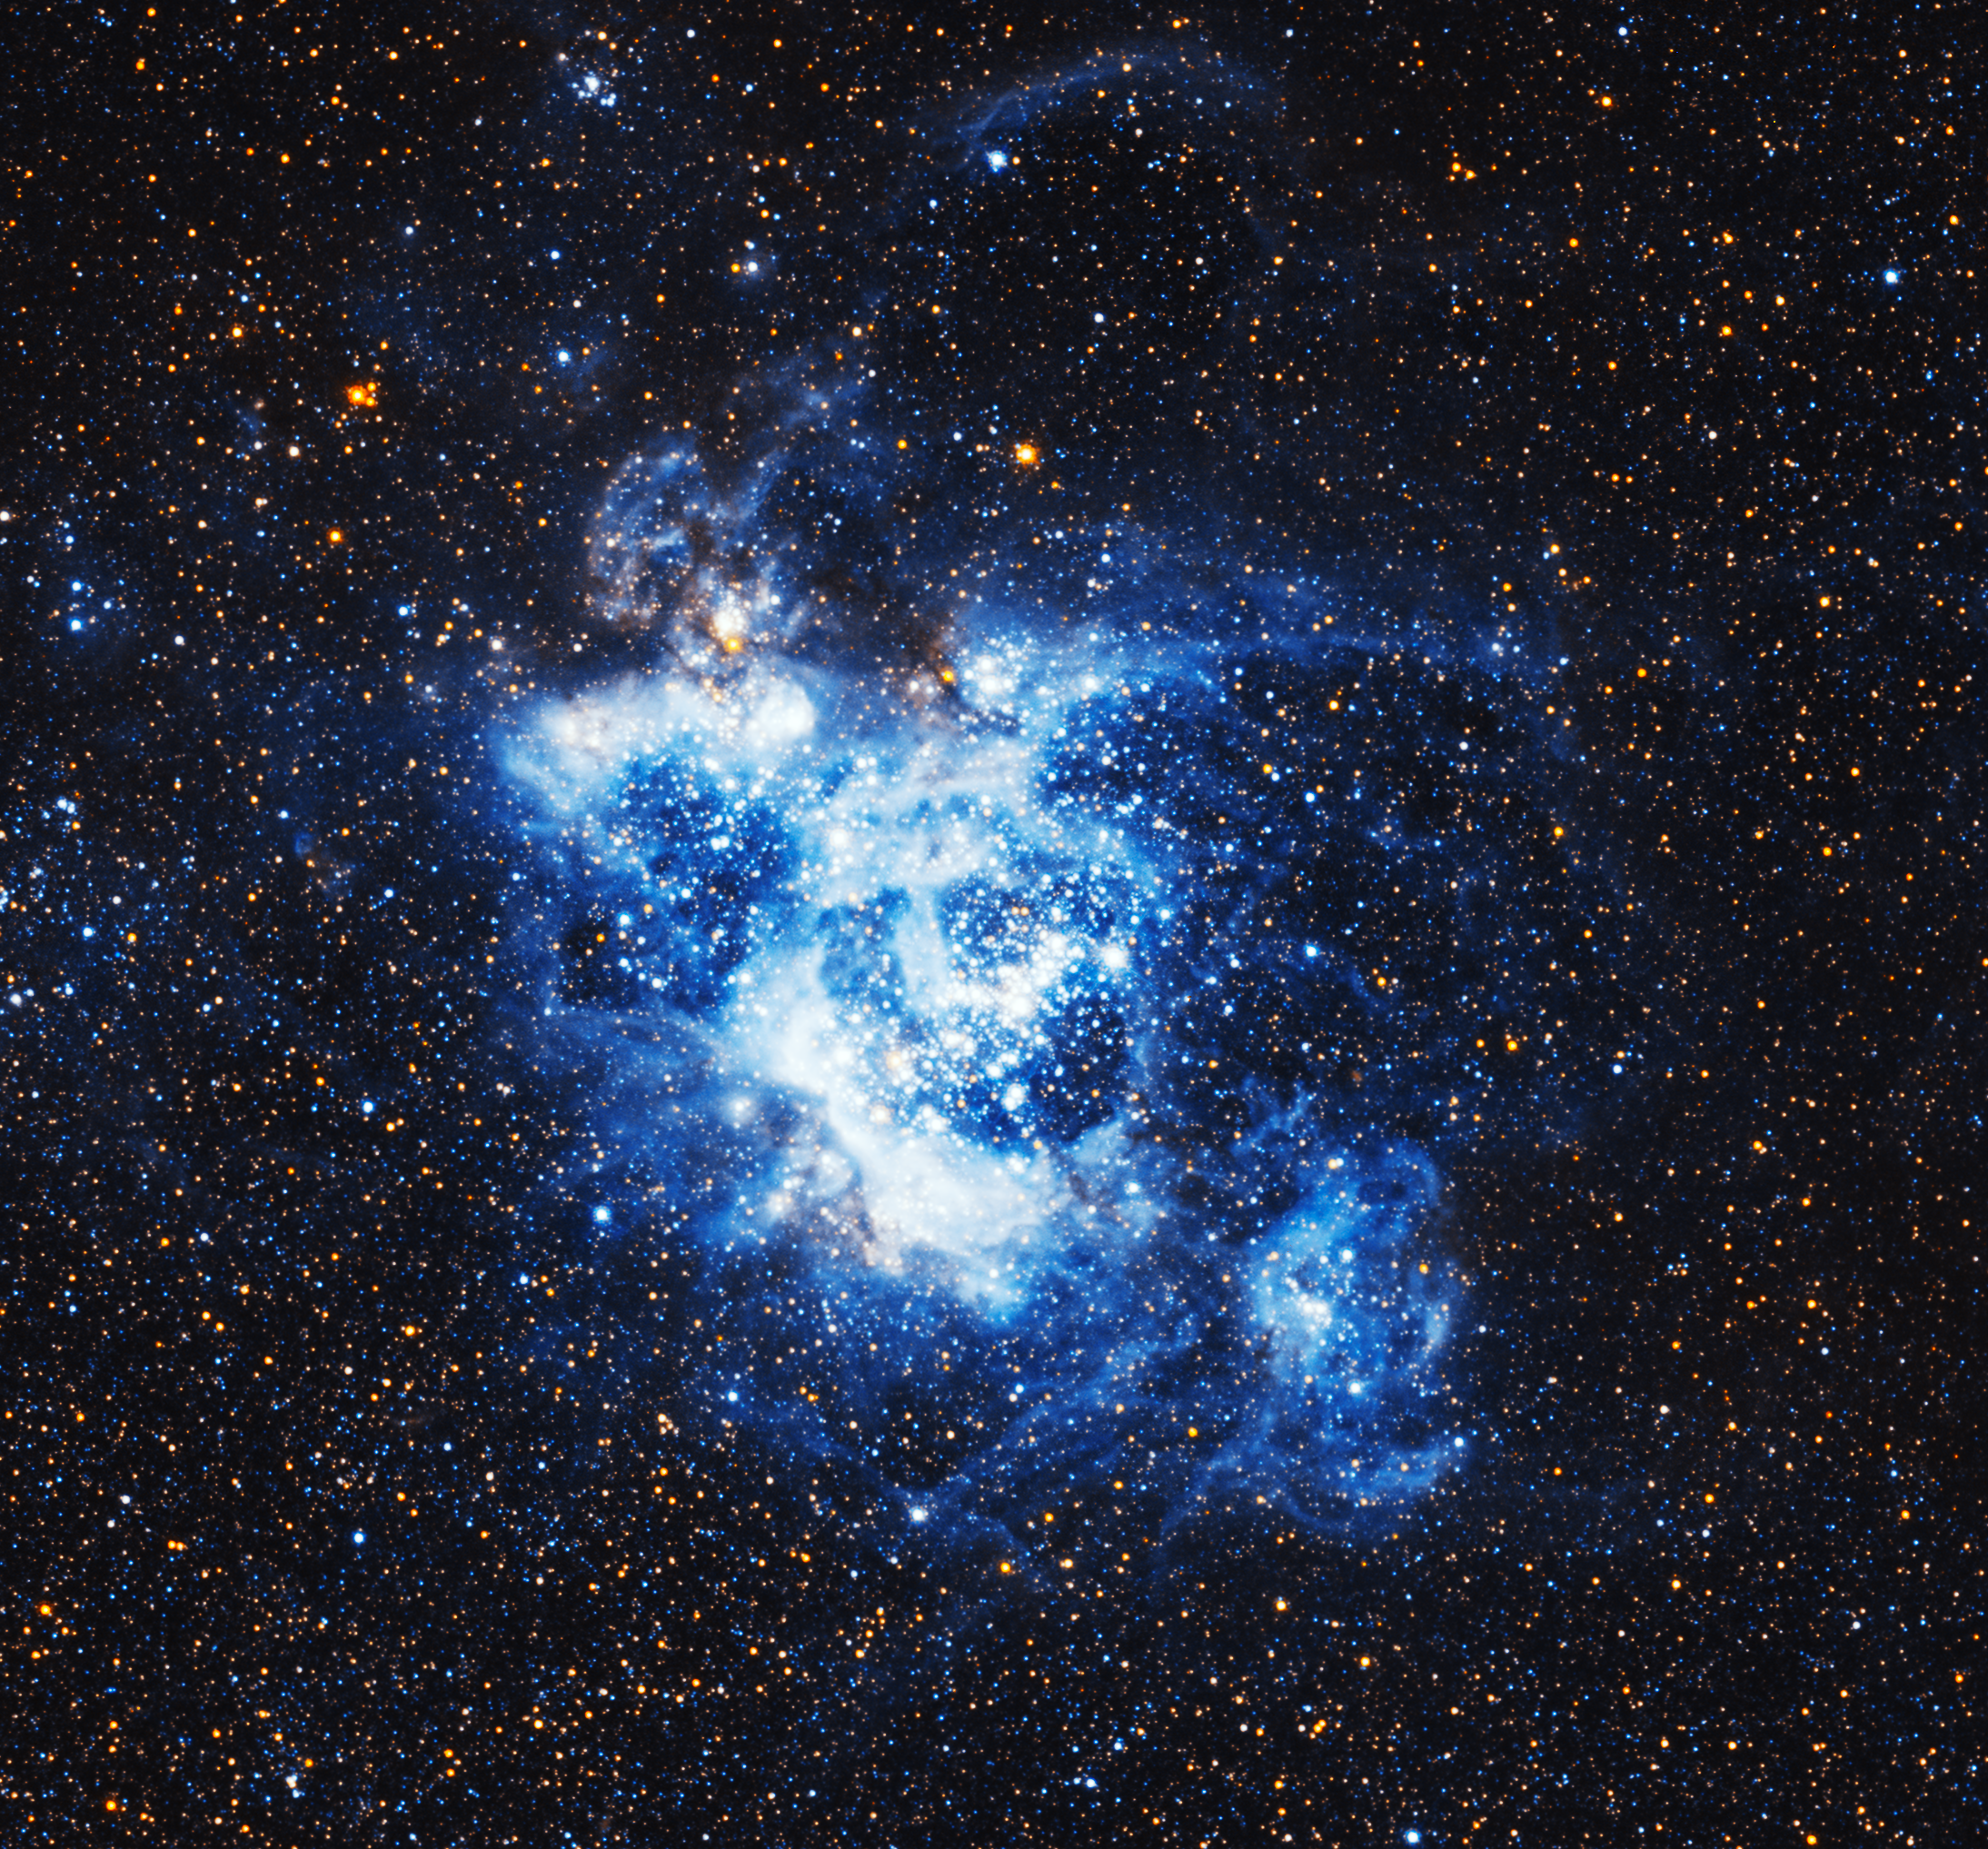

NGC 604 — a gigantic gas cloud in the Triangulum Galaxy

This image shows NGC 604, located within the Triangulum Galaxy. Some 1500 light-years across, this is one of the largest, brightest concentrations of ionised hydrogen (H II) in our Local Group of galaxies, and it is a major centre of star formation.

The gas in NGC 604, around nine-tenths of which is hydrogen, is gradually collapsing under the force of gravity to create new stars. Once these stars have formed, the energetic ultraviolet radiation they emit excites the remaining gas in the cloud.

This image is only a tiny part of the large wide-field image of the Triangulum Galaxy created by the NASA/ESA Hubble Space Telescope.

Hubble has observed this object before, with different cameras: In 2003, using the WFPC2 and in 2010, using the ACS. The different colours in the images have their origin in the different filters being used.

Credit: NASA, ESA, and M. Durbin, J. Dalcanton, and B. F. Williams (University of Washington)